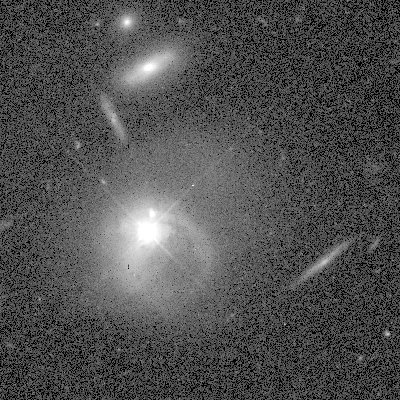

Merging quasar and galaxy

This Hubble Space Telescope image shows evidence for a merger between a quasar and a companion galaxy. This surprising result might require theorists to rethink their explanations for the nature of quasars, the most energetic objects in the universe.

Credit: John Bahcall, Institute for Advanced Study, NASA/ESA